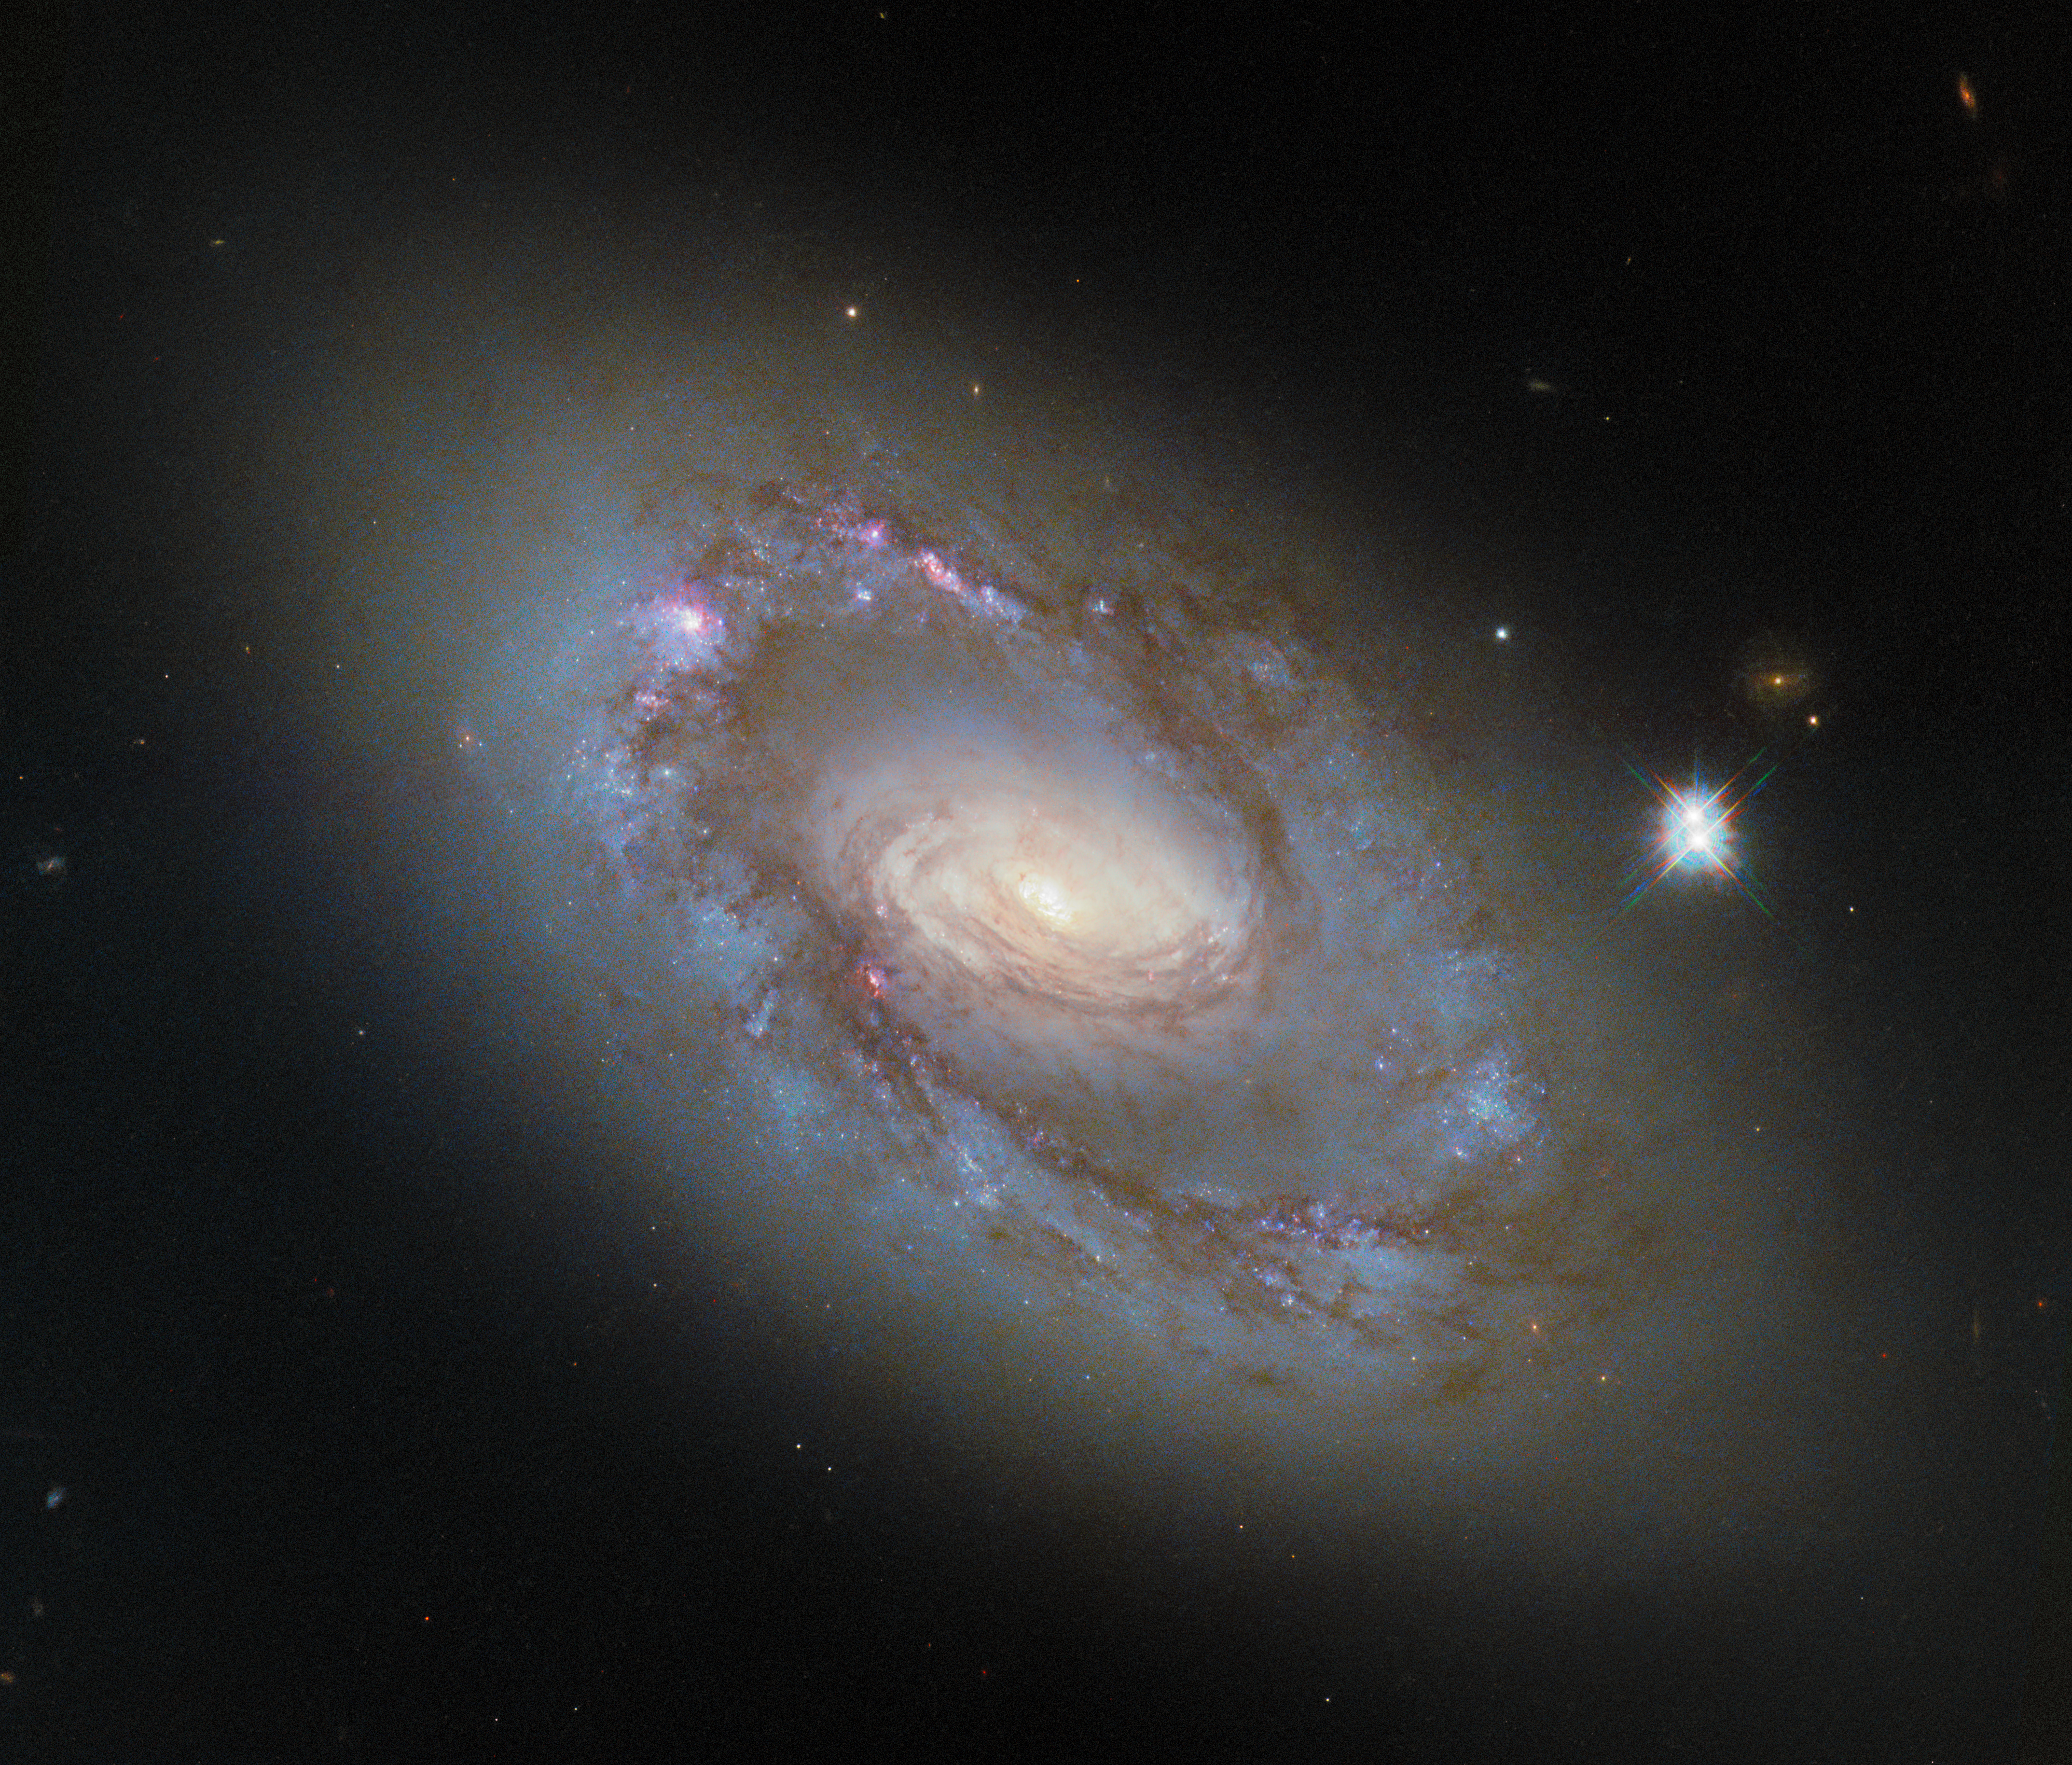

Revisiting an unusual spiral

What lies at the heart of this unusual-looking spiral galaxy? The galaxy NGC 4102, featured in this ESA/Hubble Picture of the Week, is home to what astronomers call an active galactic nucleus. Active galactic nuclei are luminous galactic centres powered by supermassive black holes that contain millions to billion times the mass of our Sun. As these black holes ensnare gas from their surroundings and draw it close with their intense gravitational pull, the gas becomes so hot that it begins to glow and emits light from X-ray to radio wavelengths.

At a distance of just 56 million light-years away in the constellation Ursa Major (The Great Bear), NGC 4102 provides an ideal opportunity to study the ways in which active galactic nuclei interact with their home galaxies. Active galactic nuclei come in many different flavours, from extremely powerful types that consume massive amounts of matter and shoot out jets of charged particles, to calmer types that sip gas from their surroundings and glow more faintly.

NGC 4102 likely falls into the latter category. It’s classified as Compton-thick — a way of saying that its nucleus is obscured by a thick layer of gas — and a LINER, or low-ionisation nuclear emission-line region. LINER galaxies are identified by emission lines from certain weakly ionised elements, and they can be powered by a supermassive black hole that is lazily collecting gas from around it.

A previous image of this galaxy, made from data taken with Hubble’s Wide Field Planetary Camera 2 (WFPC2), was released in 2014. This new version presents an upgraded view of the galaxy, using data from the Wide Field Camera 3, which replaced WFPC2 in 2009 and improved upon its resolution and field of view. The new observations come from a programme that will combine visible-light images from Hubble with X-ray information from the Chandra X-ray Observatory to study the relationship between NGC 4102 and its active galactic nucleus.

Credit: ESA/Hubble & NASA, G. Fabbiano